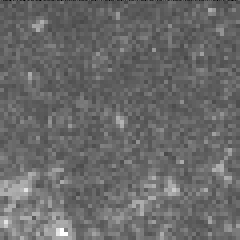

Cepheid variable star in galaxy M100

The interval it takes for the Cepheid to complete one pulsation is a direct indication of the stars's intrinsic brightness. This value can be used to make a precise measurement of the galaxy's distance, which turns out to be 56 million light-years from Earth. This image was taken on May 9, 1994.

Credit: Dr. Wendy L. Freedman, Observatories of the Carnegie Institution of Washington, and NASA/ESA